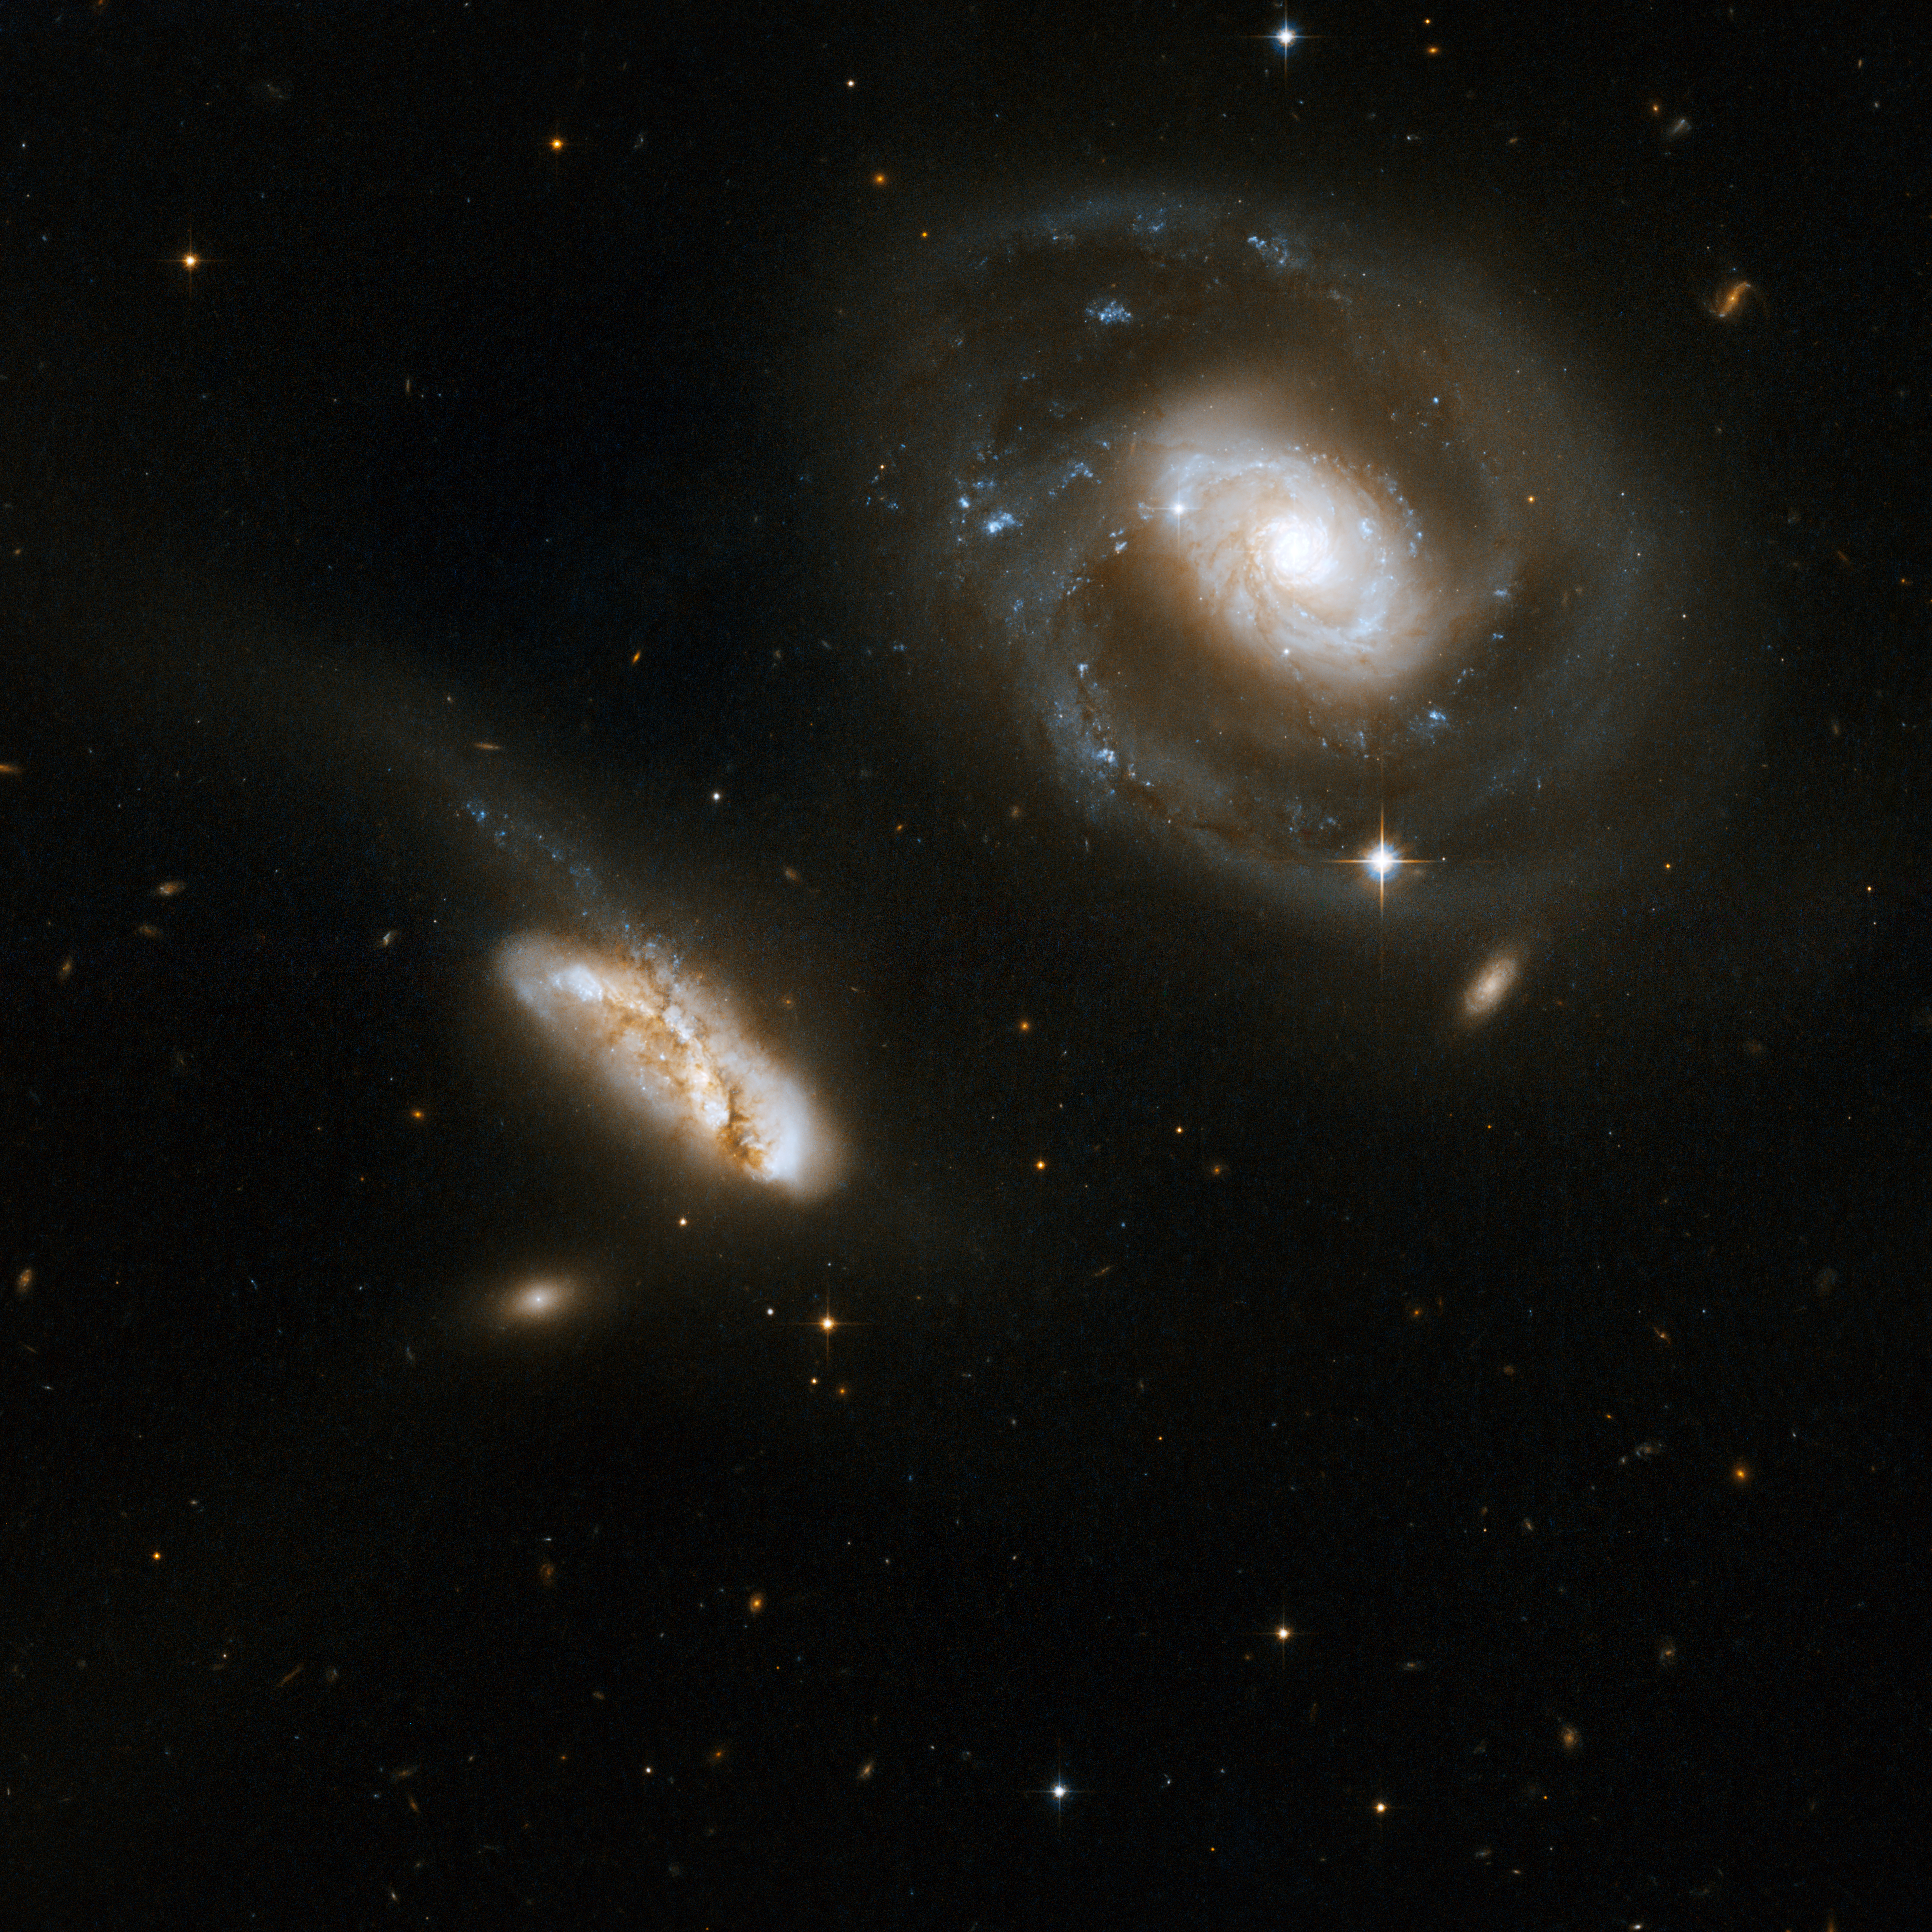

NGC 7469

This is a stunning pair of interacting galaxies, the barred spiral Seyfert 1 galaxy NGC 7469 (Arp 298, Mrk 1514), a luminous infrared source with a powerful starburst deeply embedded into its circumnuclear region, and its smaller companion IC 5283.

This system is located about 200 million light-years away from Earth in the constellation of Pegasus, the Winged Horse.

This image is part of a large collection of 59 images of merging galaxies taken by the Hubble Space Telescope and released on the occasion of its 18th anniversary on 24th April 2008.

Credit: NASA, ESA, the Hubble Heritage Team (STScI/AURA)-ESA/Hubble Collaboration and A. Evans (University of Virginia, Charlottesville/NRAO/Stony Brook University)